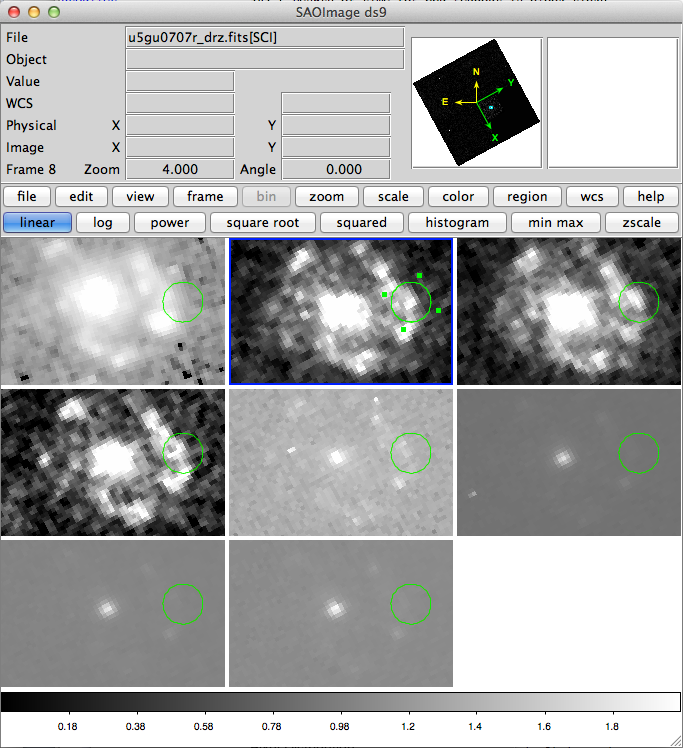

Hubble observations from NGC 7469 displayed in ds9

This screenshot shows the Hubble observations from NGC 7469 taken from the archive and displayed in ds9. The supernova SN2000ft is clearly visible.

Credit: ESA, NASA, ESAC